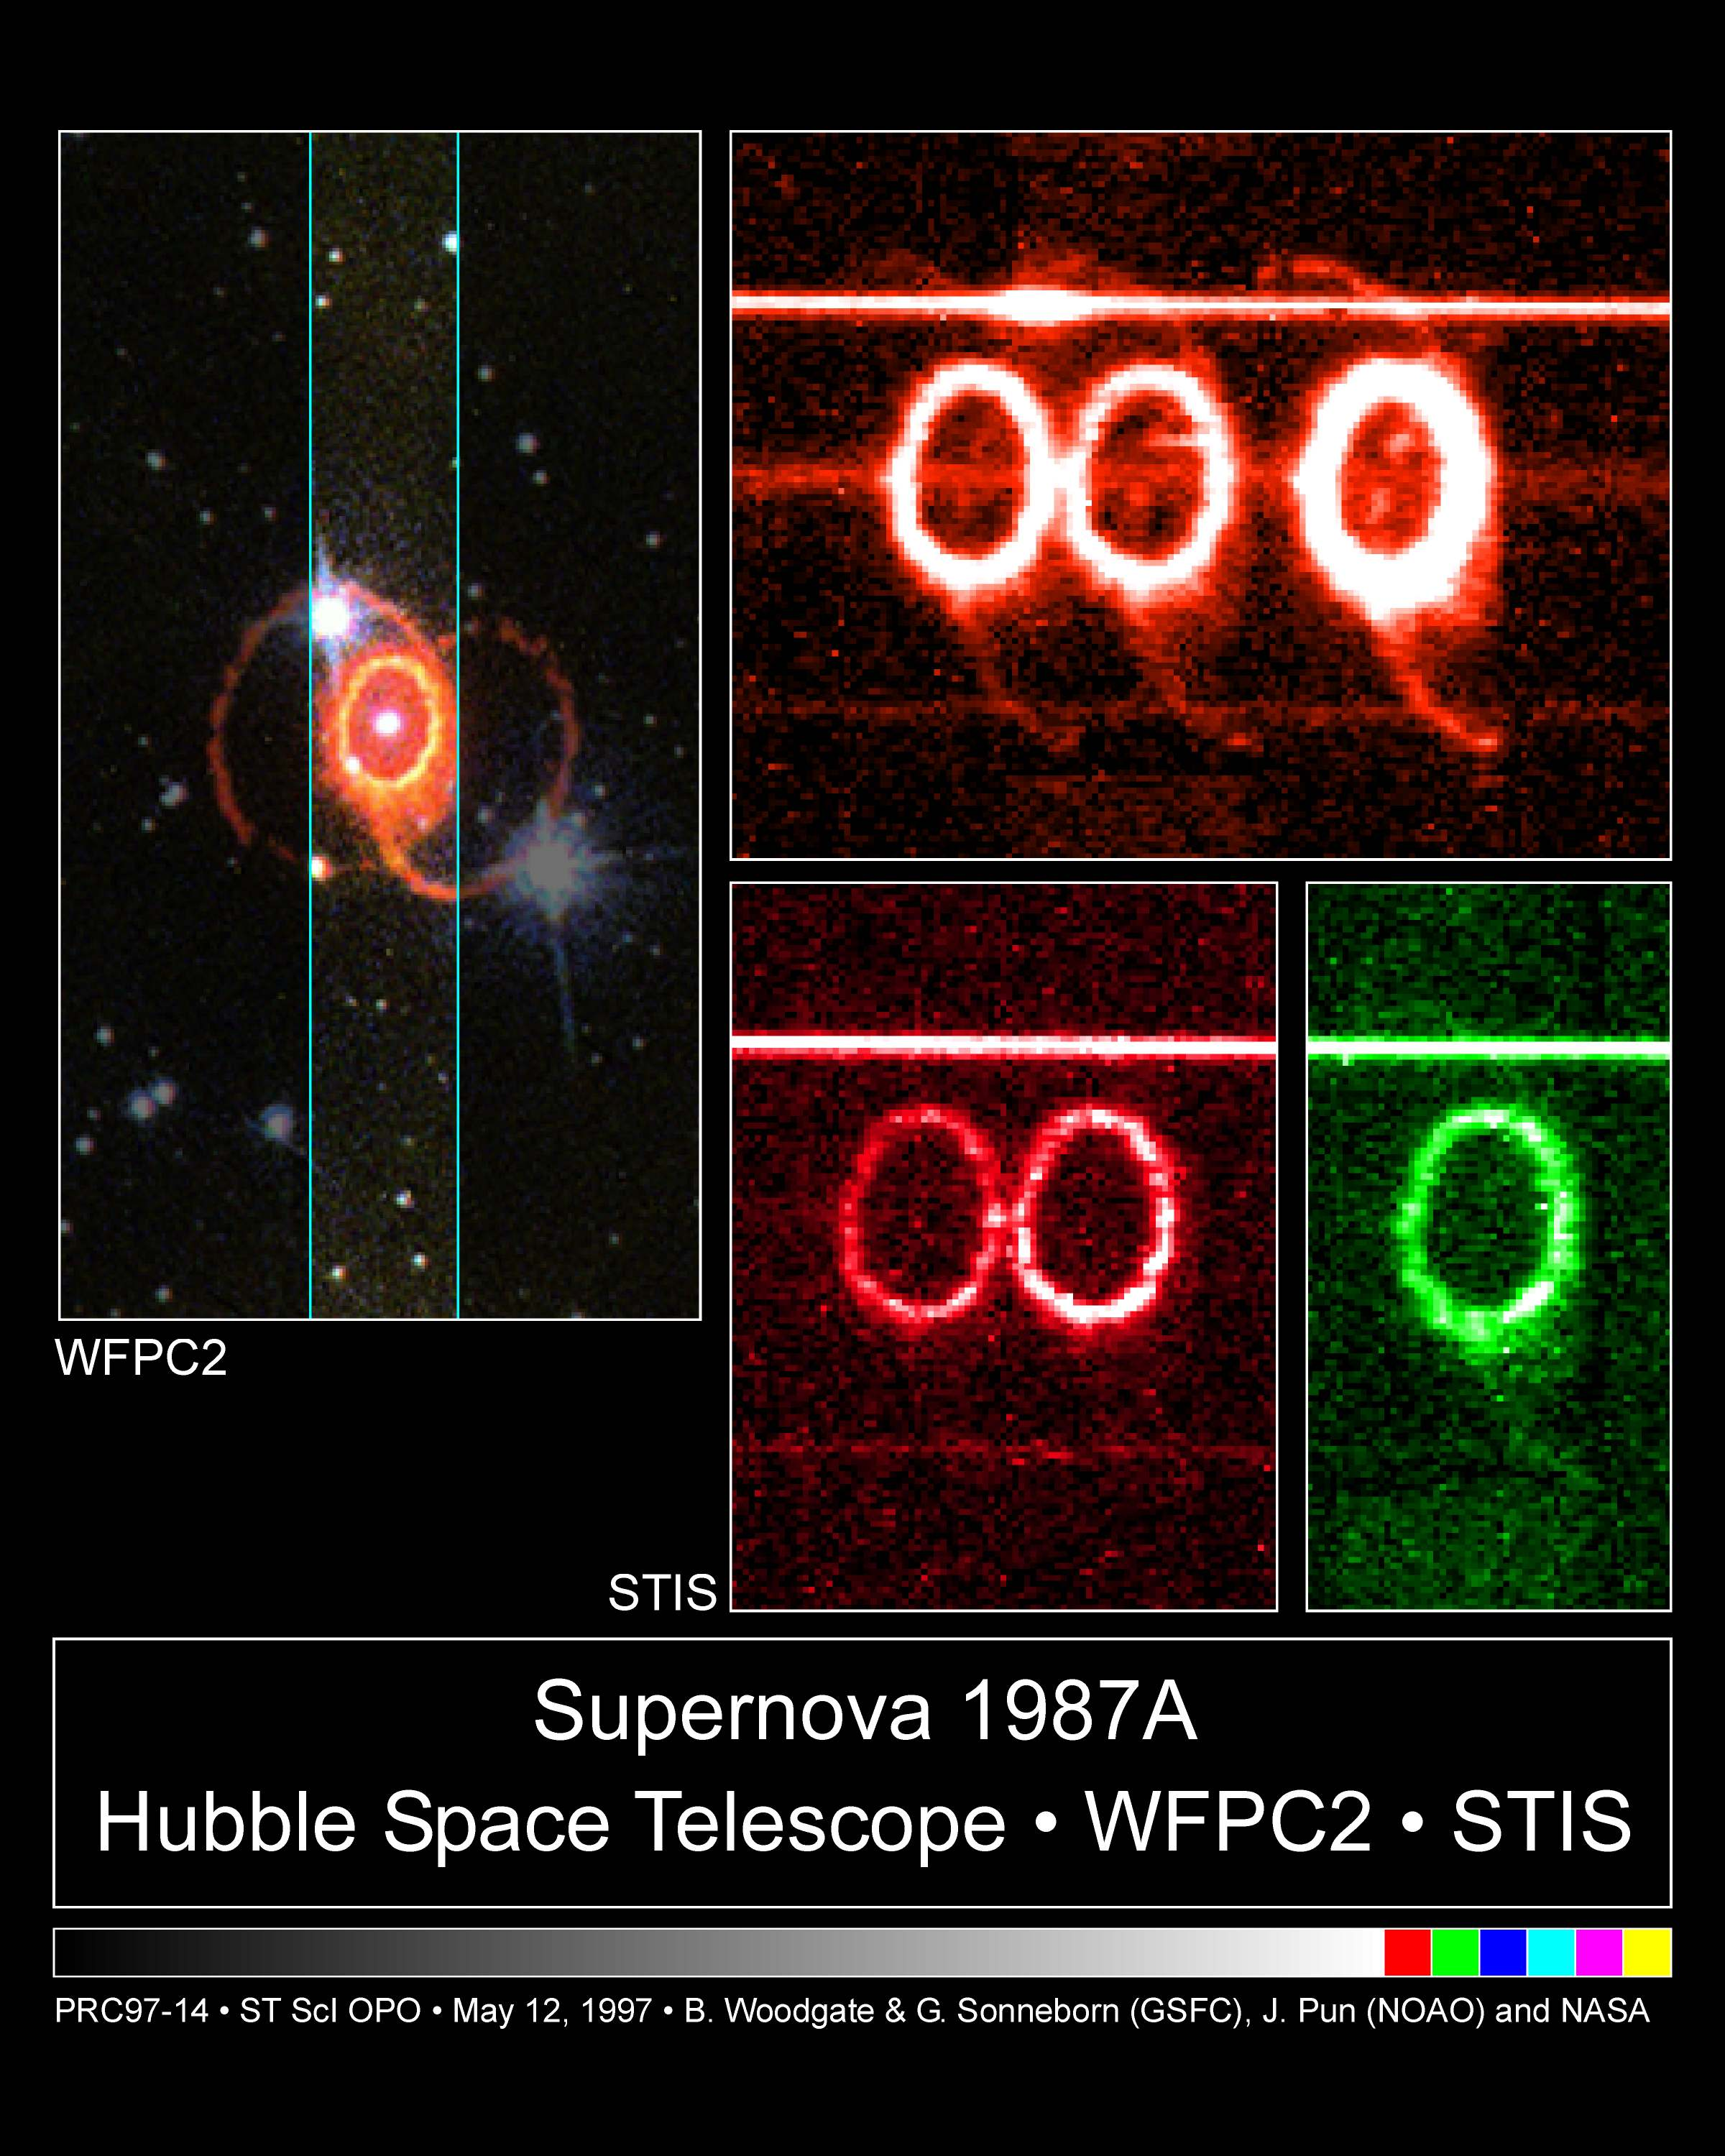

STIS chemically analyzes the ring around supernova 1987a

These images from the Hubble's Space Telescope Imaging Spectrograph (STIS) provide a new and unprecedented look at one of the most unique and complex structures in the universe -- a light-year wide ring of glowing gas around supernova 1987A, the nearest stellar explosion in 400 years, which occurred in February 1987.

Credit: George Sonneborn (GSFC) and NASA/ESA